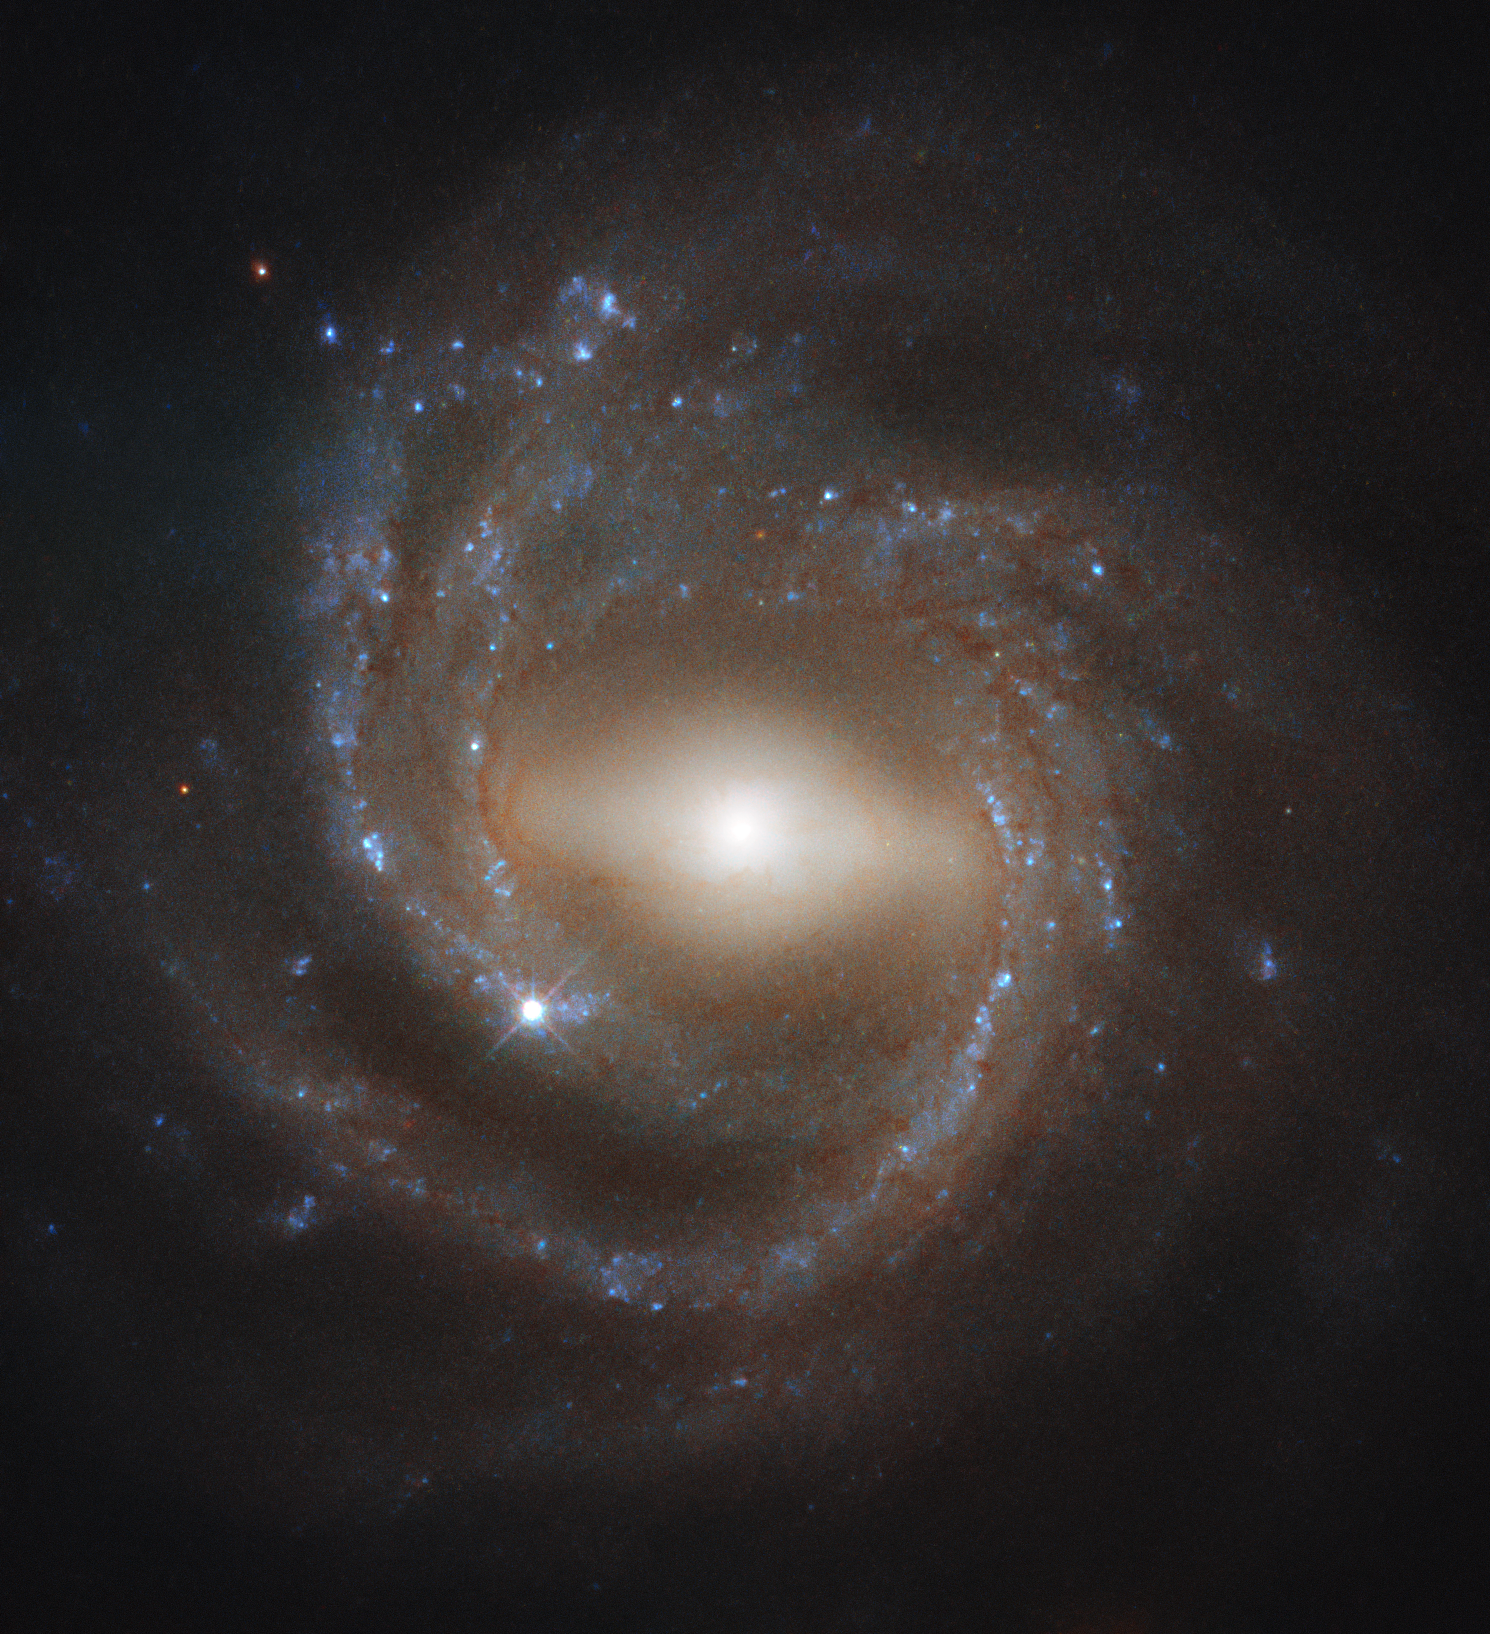

Galactic maturity

This striking image was taken by the NASA/ESA Hubble Space Telescope’s Wide Field Camera 3, a powerful instrument installed on the telescope in 2009. WFC3 is responsible for many of Hubble’s most breathtaking and iconic photographs, including Pictures of the Week.

Shown here, NGC 7773 is a beautiful example of a barred spiral galaxy. A luminous bar-shaped structure cuts prominently through the galaxy's bright core, extending to the inner boundary of NGC 7773's sweeping, pinwheel-like spiral arms. Astronomers think that these bar structures emerge later in the lifetime of a galaxy, as star-forming material makes its way towards the galactic centre — younger spirals do not feature barred structures as often as older spirals do, suggesting that bars are a sign of galactic maturity. They are also thought to act as stellar nurseries, as they gleam brightly with copious numbers of youthful stars.

Our galaxy, the Milky Way, is thought to be a barred spiral like NGC 7773. By studying galactic specimens such as NGC 7773 throughout the Universe, researchers hope to learn more about the processes that have shaped — and continue to shape — our cosmic home.

Credit: ESA/Hubble & NASA, J. Walsh